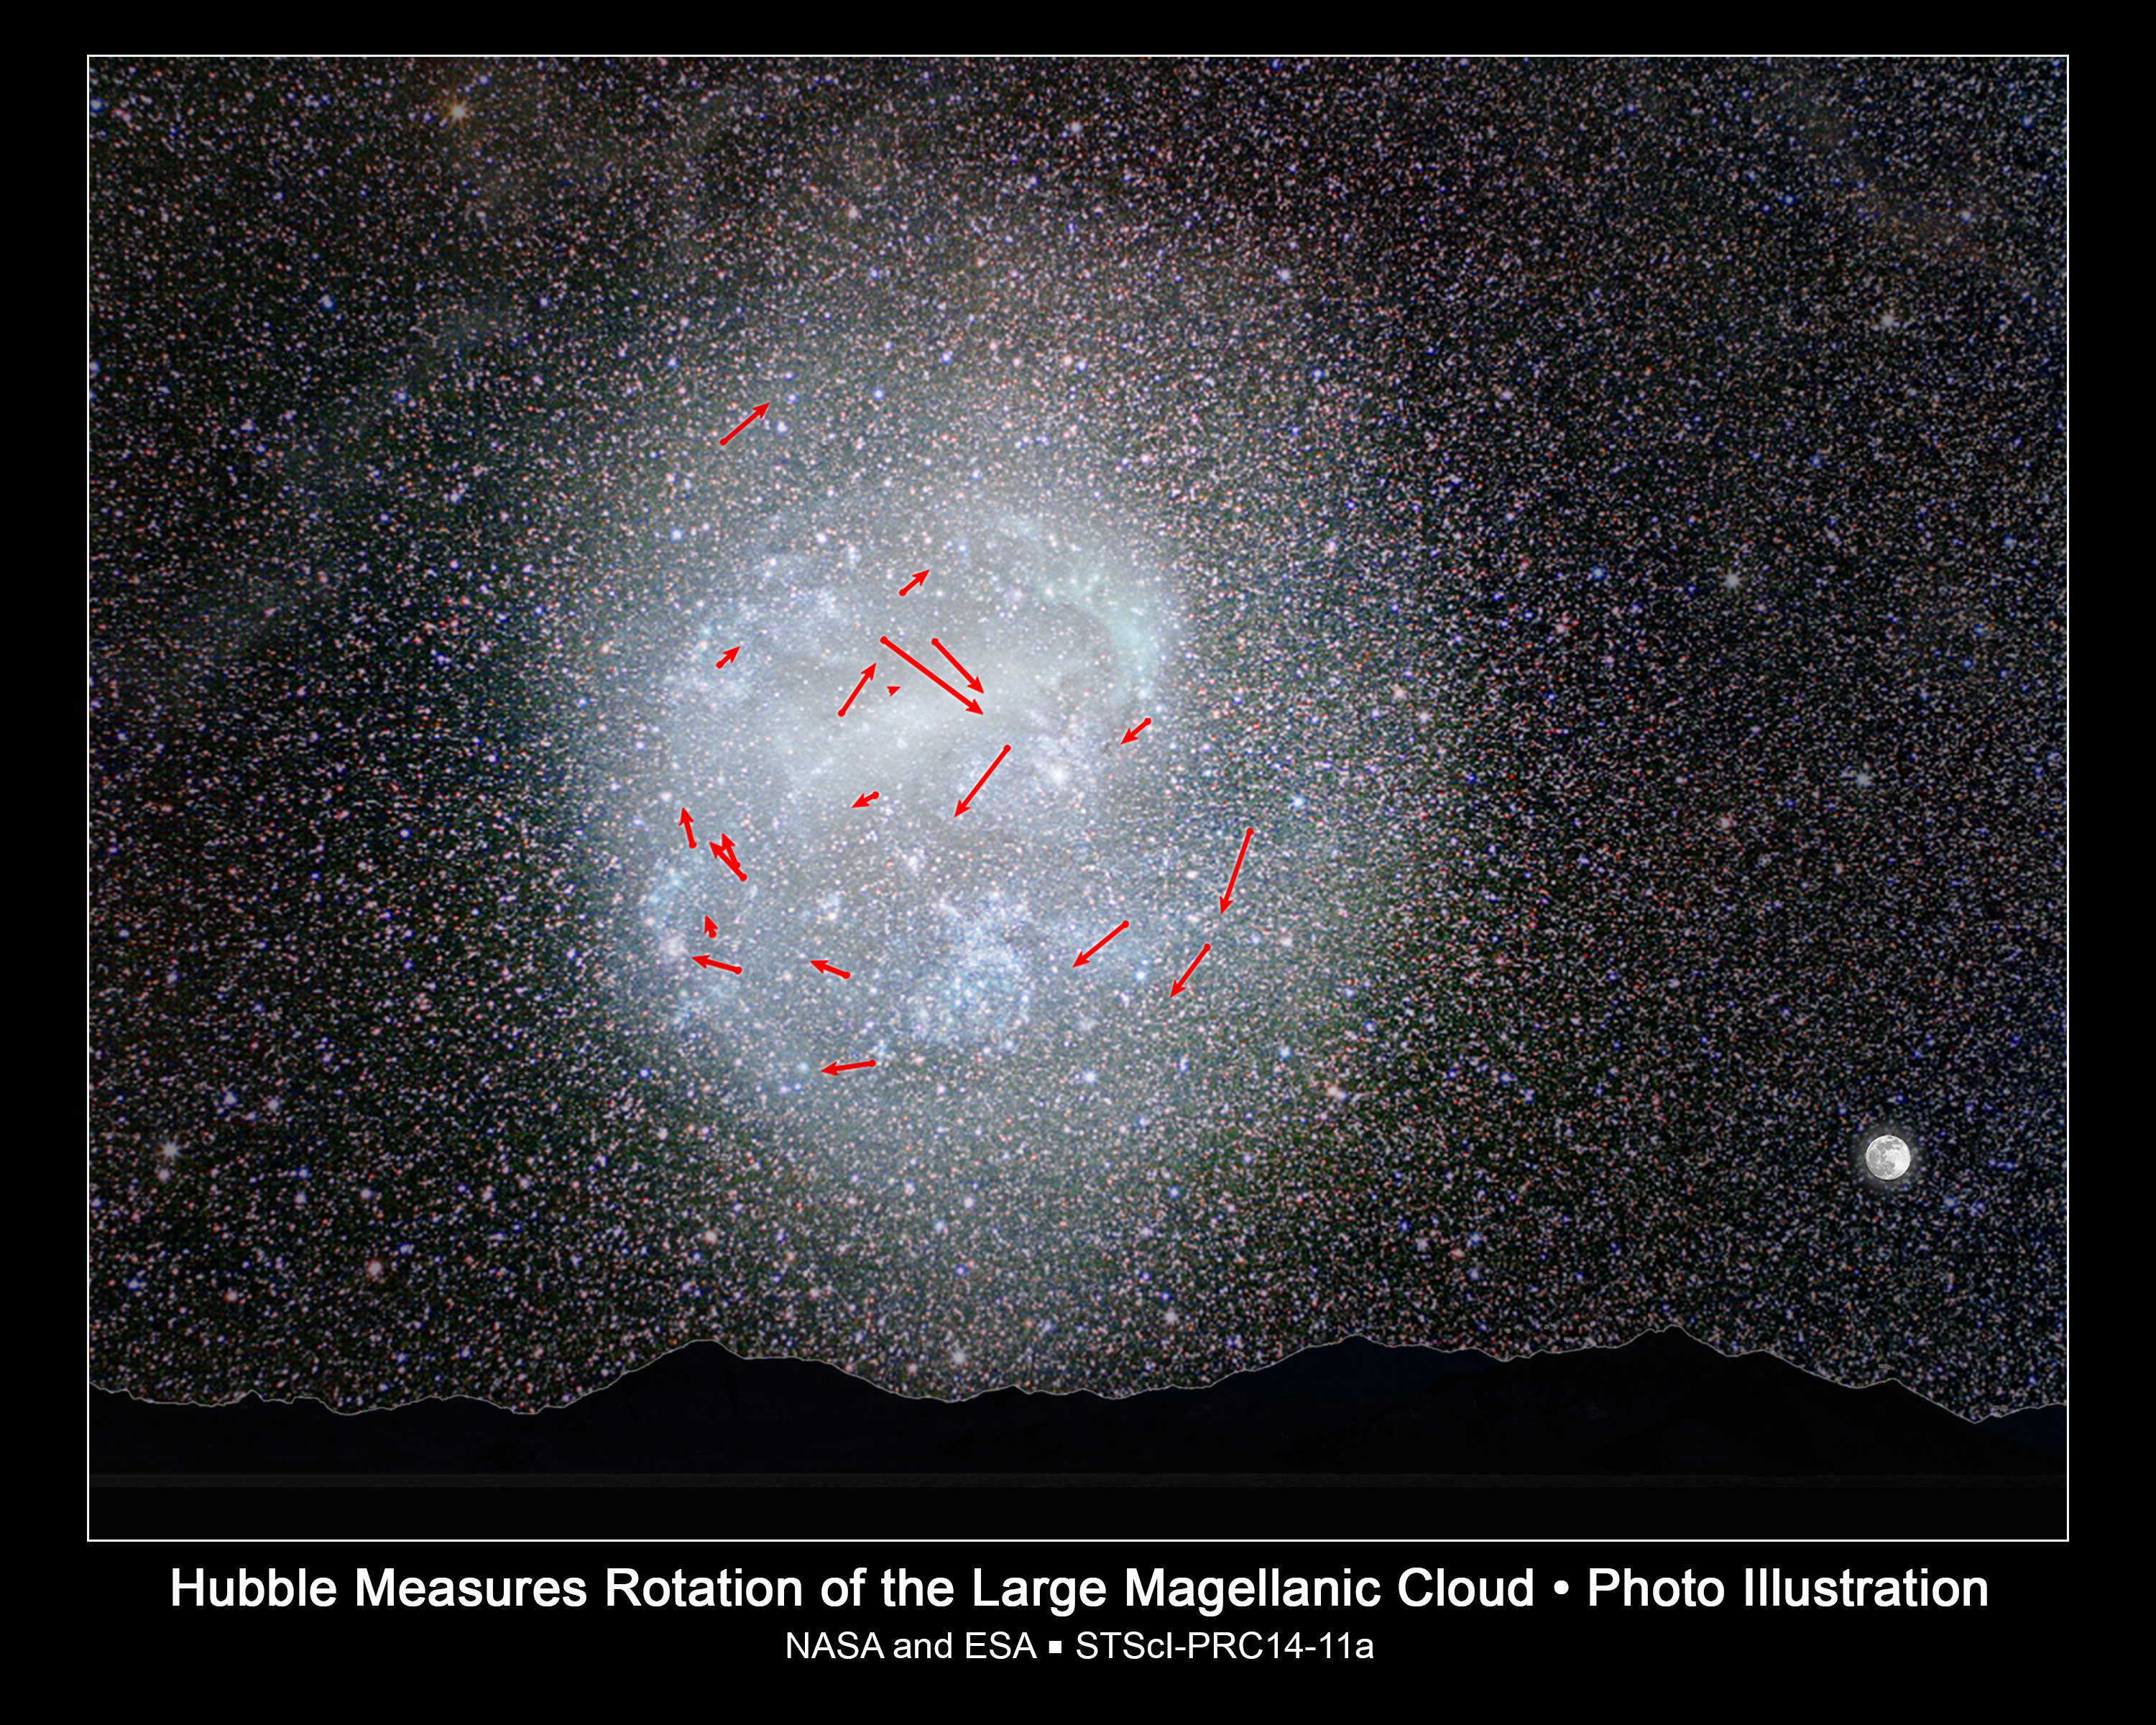

Hubble captures stellar clockwork motion in nearby galaxy

This illustration shows NASA/ESA Hubble Space Telescope measurements of the rotation of the Large Magellanic Cloud (LMC), the nearest visible galaxy to our Milky Way galaxy. The LMC appears in the Southern sky, as seen in this ground-based photo. The image contrast was enhanced to highlight the LMC's faint outer regions, which are not visible to the naked eye. To illustrate the LMC's large apparent size on the sky, an image of the full moon is shown at bottom right. A horizon has been added for perspective.

The red arrows represent the highest-quality Hubble measurements of the motion of the LMC's stars to show how this galaxy rotates. Each arrow reveals the predicted motion over the next 7 million years. The motion of the stars measured by Hubble over a few years' time are a million times smaller than the length of each arrow. The LMC completes a rotation every 250 million years.

Credit: NASA, ESA, A. Feild and Z. Levay (STScI), Y. Beletsky (Las Campanas Observatory), and R. van der Marel (STScI)
Science Credit: NASA, ESA, R. van der Marel (STScI), and N. Kallivayalil (University of Virginia)